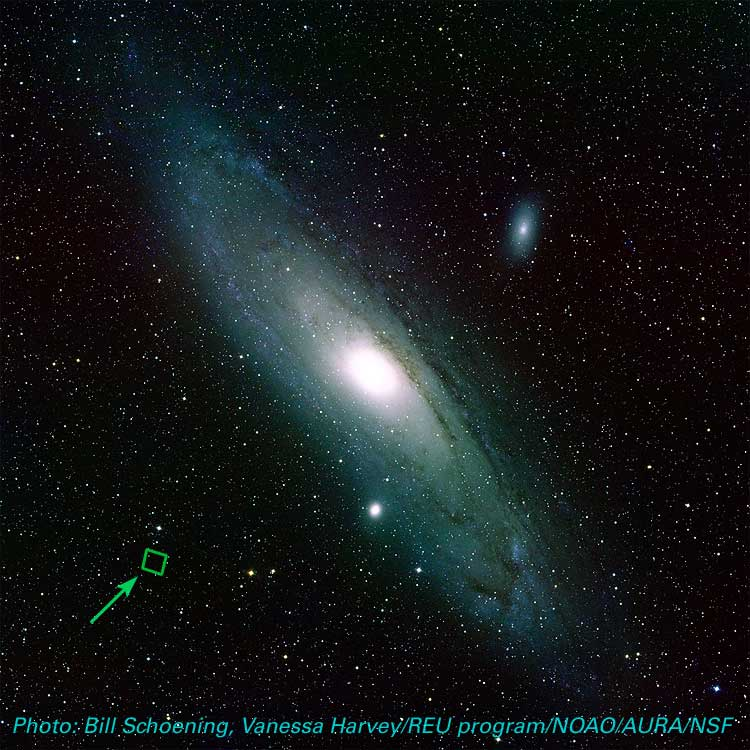

Location of ACS Image in M31 (ground-based image)

This image shows the location of an Advanced Camera for Surveys series of a portion of the Andromeda Galaxy.

For more information, please search the archive for 'opo0315' or click the press release link below.

Credit: Bill Schoening, Vanessa Harvey/REU program/NOAO/AURA/NSF